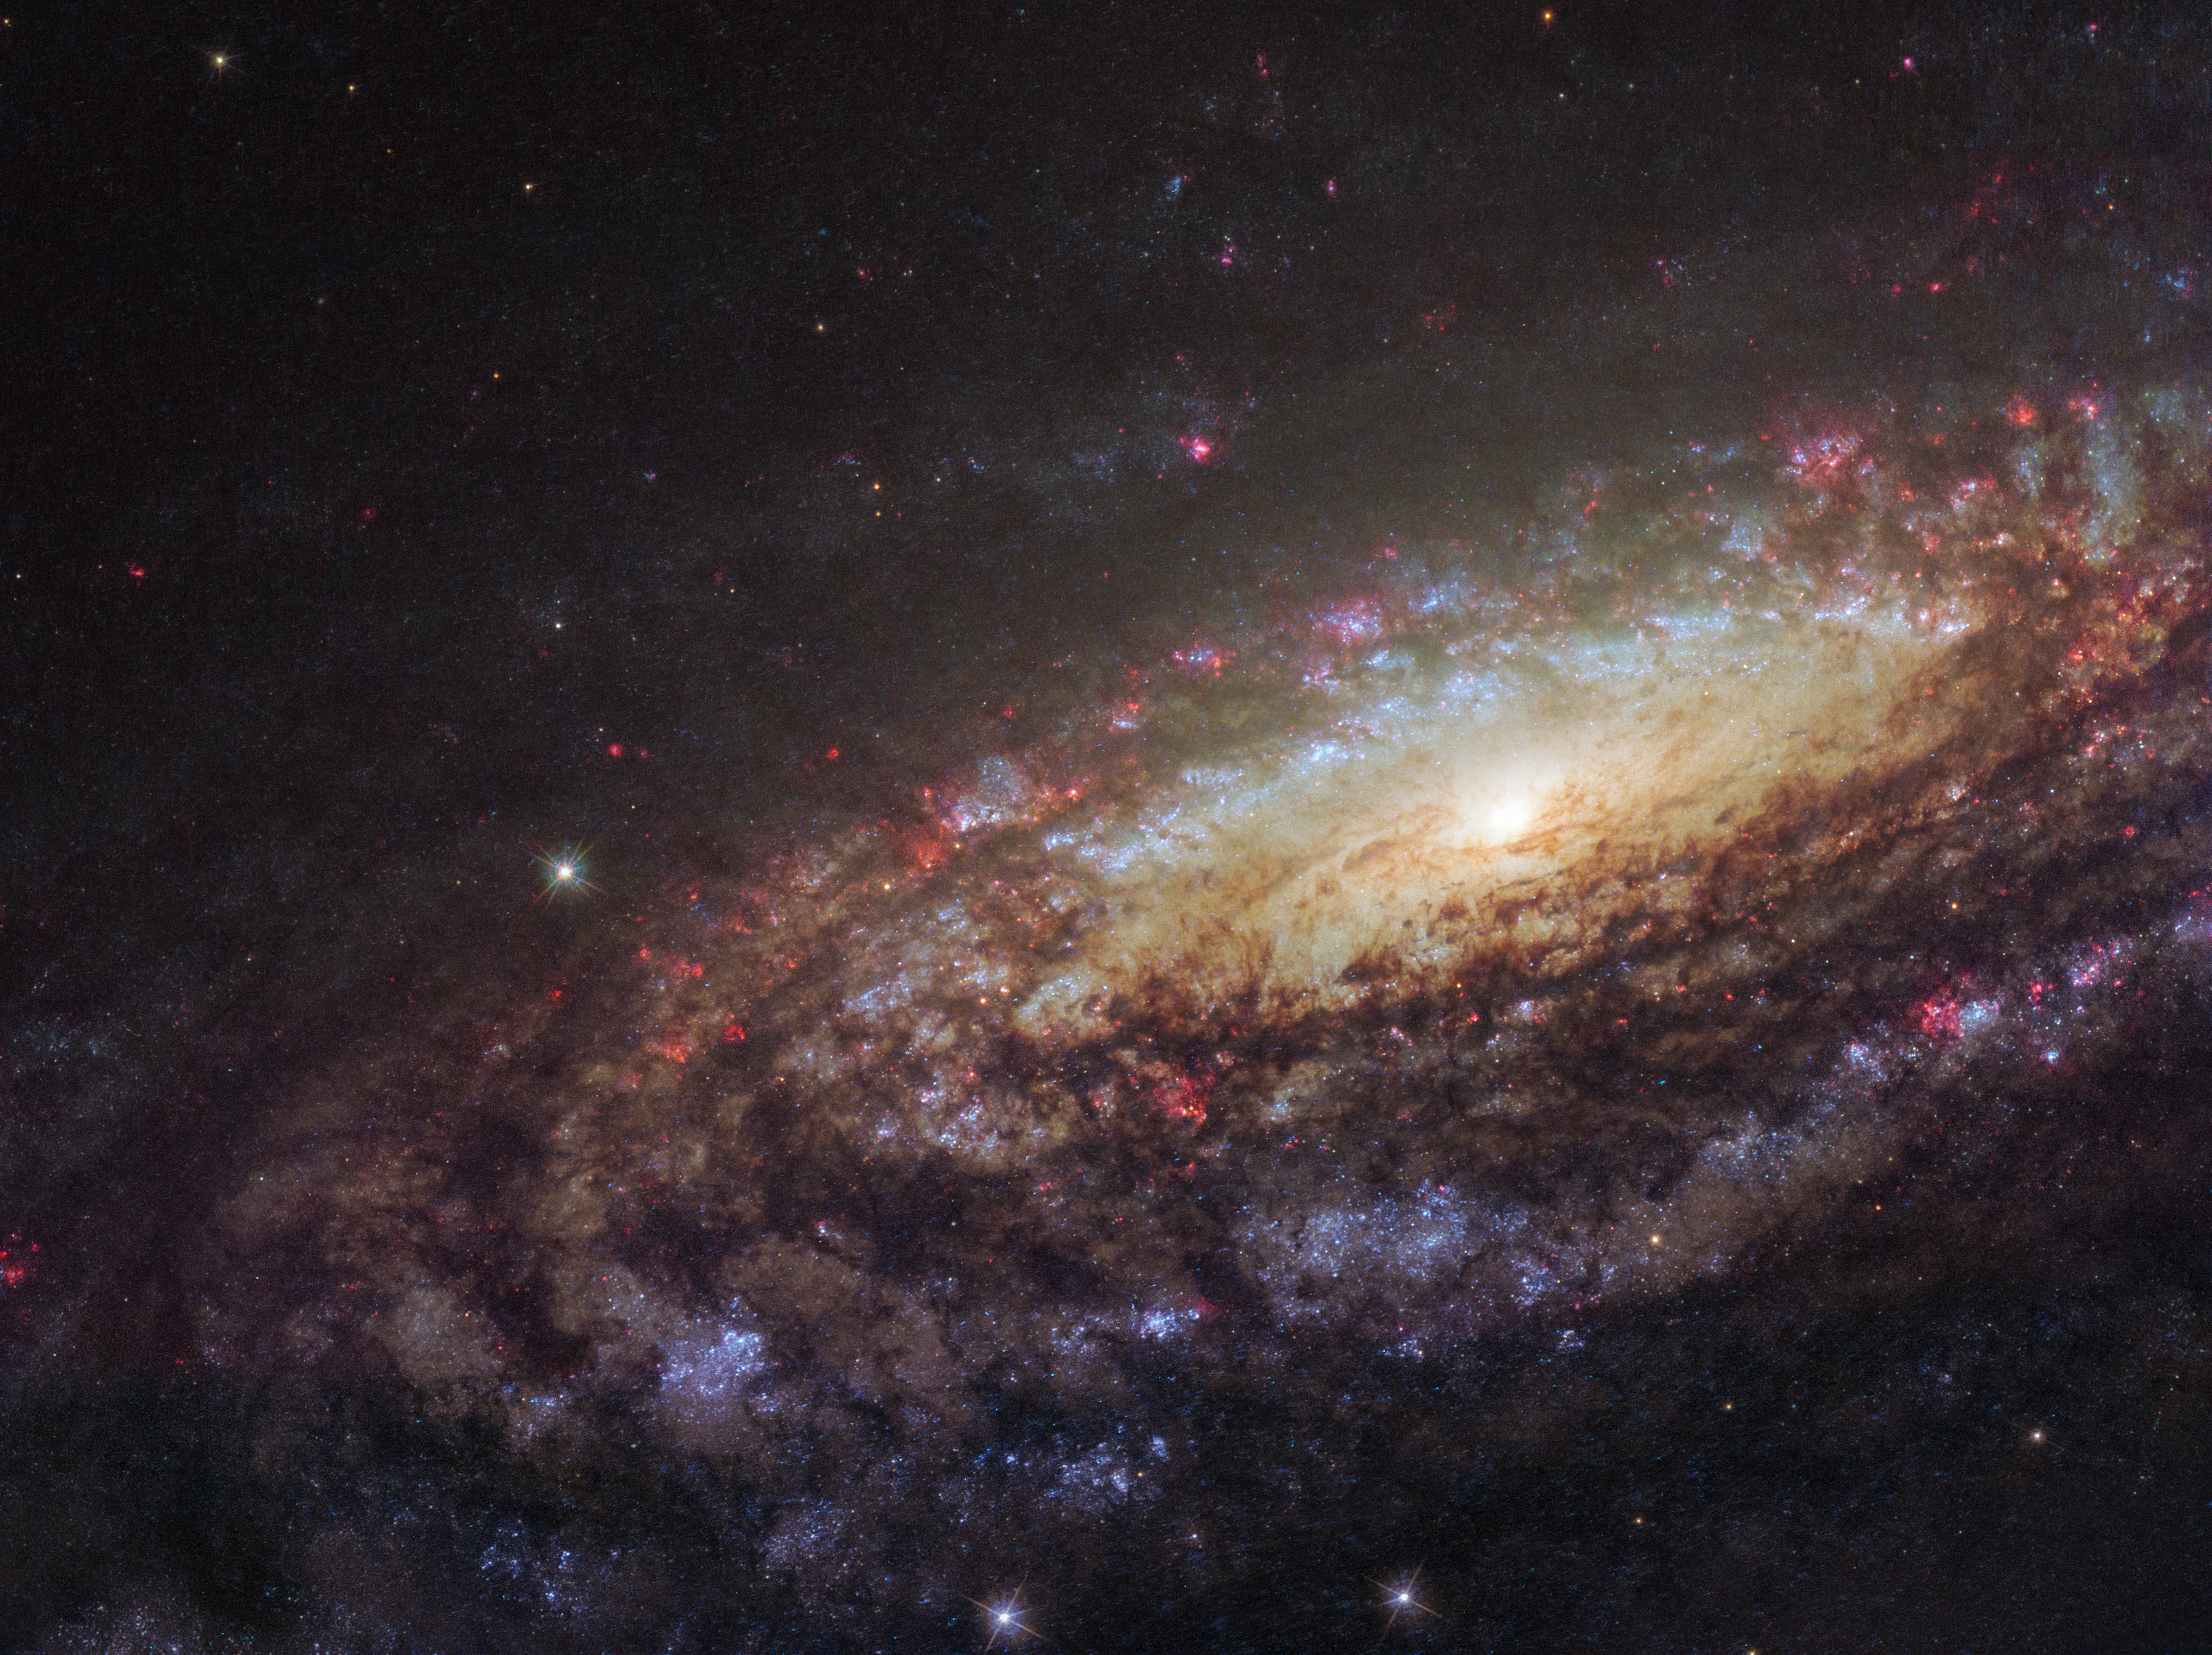

Twins with differences

This NASA/ESA Hubble Space Telescope image shows a spiral galaxy known as NGC 7331. First spotted by the prolific galaxy hunter William Herschel in 1784, NGC 7331 is located about 45 million light-years away in the constellation of Pegasus (The Winged Horse). Facing us partially edge-on, the galaxy showcases it’s beautiful arms which swirl like a whirlpool around its bright central region.

Astronomers took this image using Hubble’s Wide Field Camera 3 (WFC3), as they were observing an extraordinary exploding star — a supernova — which can still be faintly seen as a tiny red dot near the galaxy’s central yellow core. Named SN2014C, it rapidly evolved from a supernova containing very little Hydrogen to one that is Hydrogen-rich — in just one year. This rarely observed metamorphosis was luminous at high energies and provides unique insight into the poorly understood final phases of massive stars.

NGC 7331 is similar in size, shape, and mass to the Milky Way. It also has a comparable star formation rate, hosts a similar number of stars, has a central supermassive black hole and comparable spiral arms. The primary difference between our galaxies is that NGC 7331 is an unbarred spiral galaxy — it lacks a “bar” of stars, gas and dust cutting through its nucleus, as we see in the Milky Way. Its central bulge also displays a quirky and unusual rotation pattern, spinning in the opposite direction to the galactic disc itself.

By studying similar galaxies we hold a scientific mirror up to our own, allowing us to build a better understanding of our galactic environment which we cannot always observe, and of galactic behaviour and evolution as a whole.

Credit: ESA/Hubble & NASA/D. Milisavljevic (Purdue University)